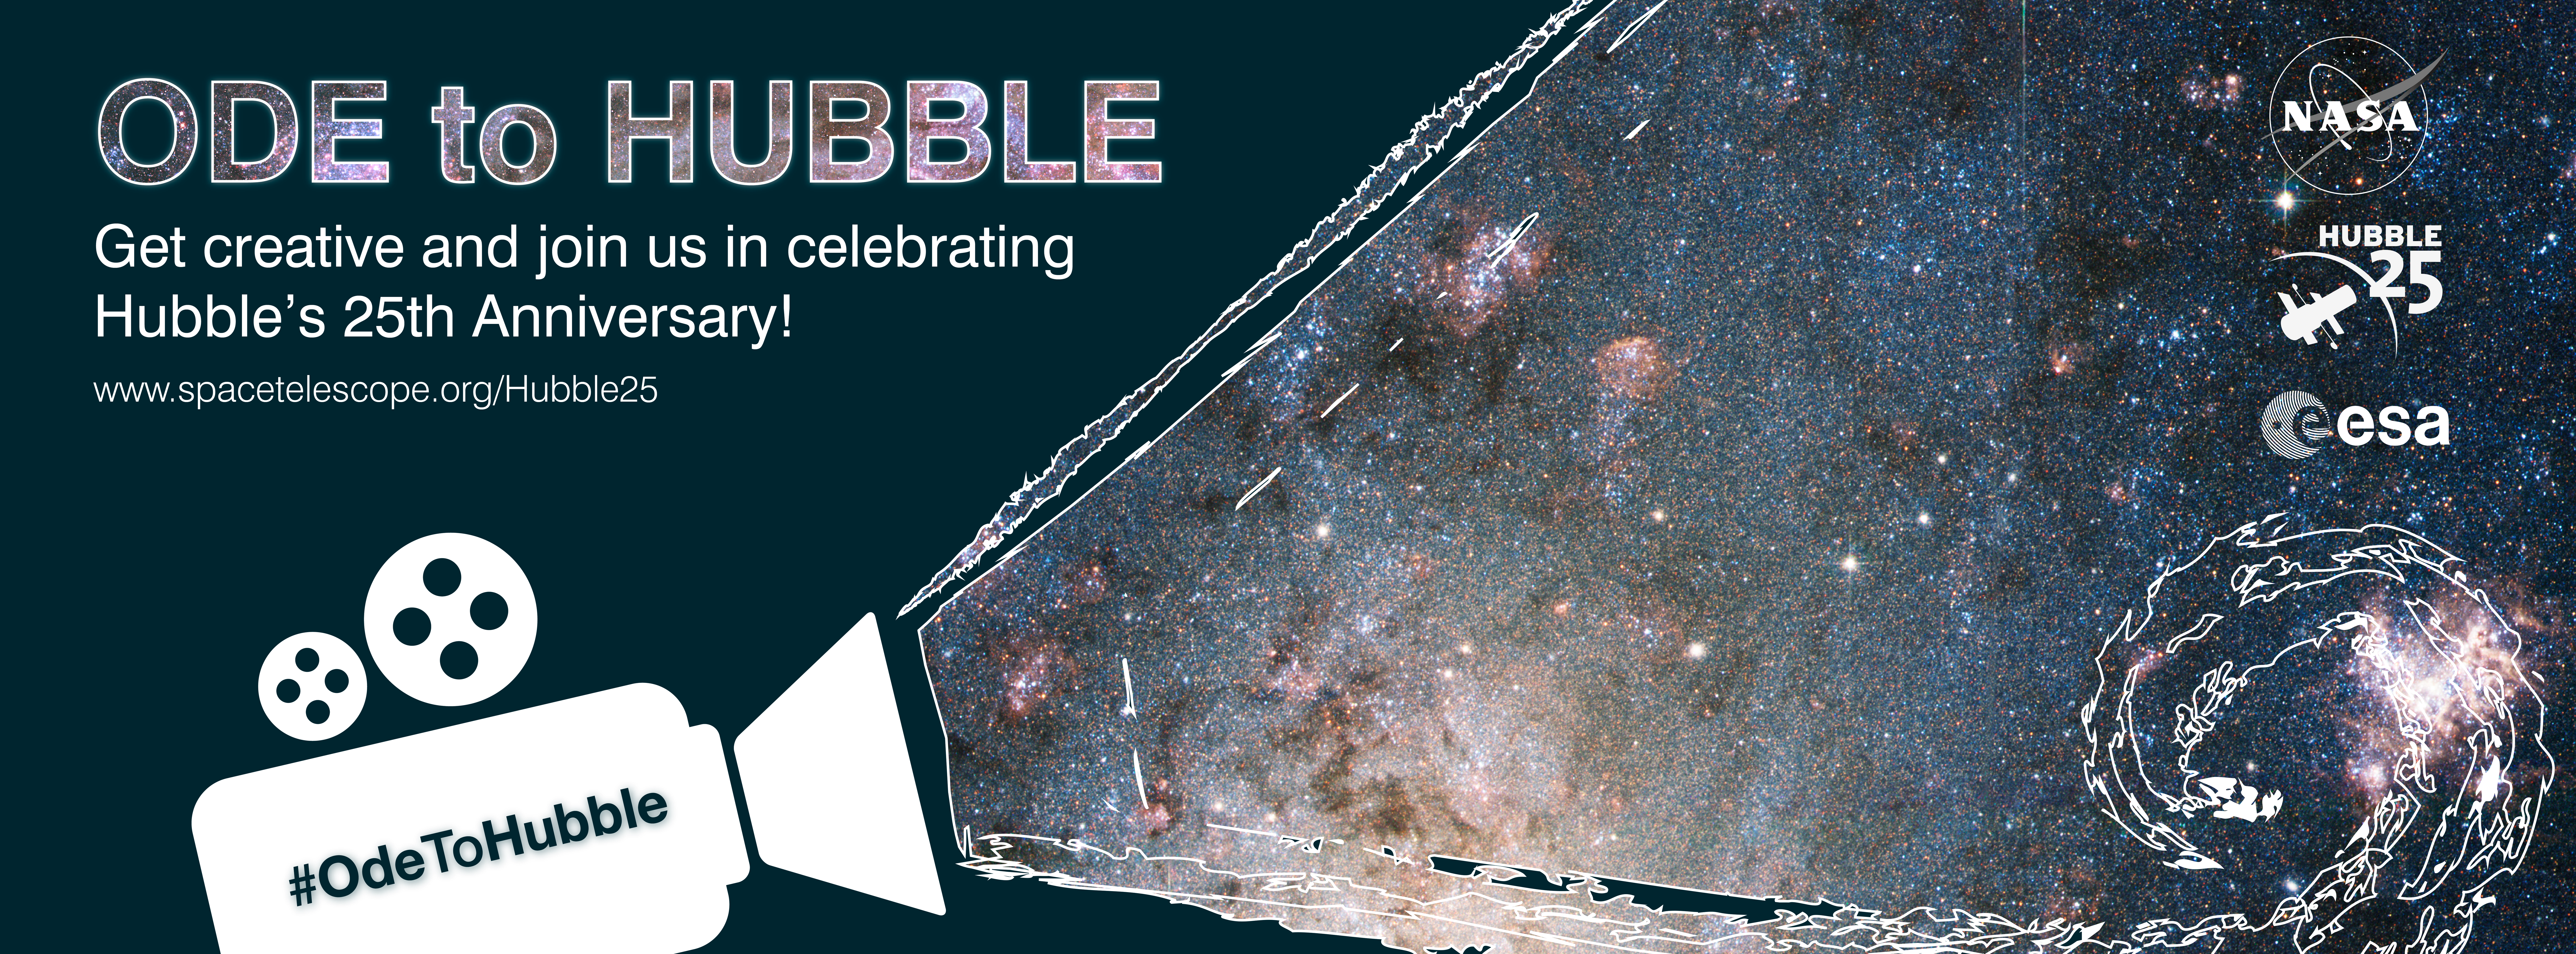

Ode to Hubble

A promotional banner for the Ode to Hubble competition. A video competition to celebrate Hubble's 25th year in orbit.

Credit: NASA & ESA